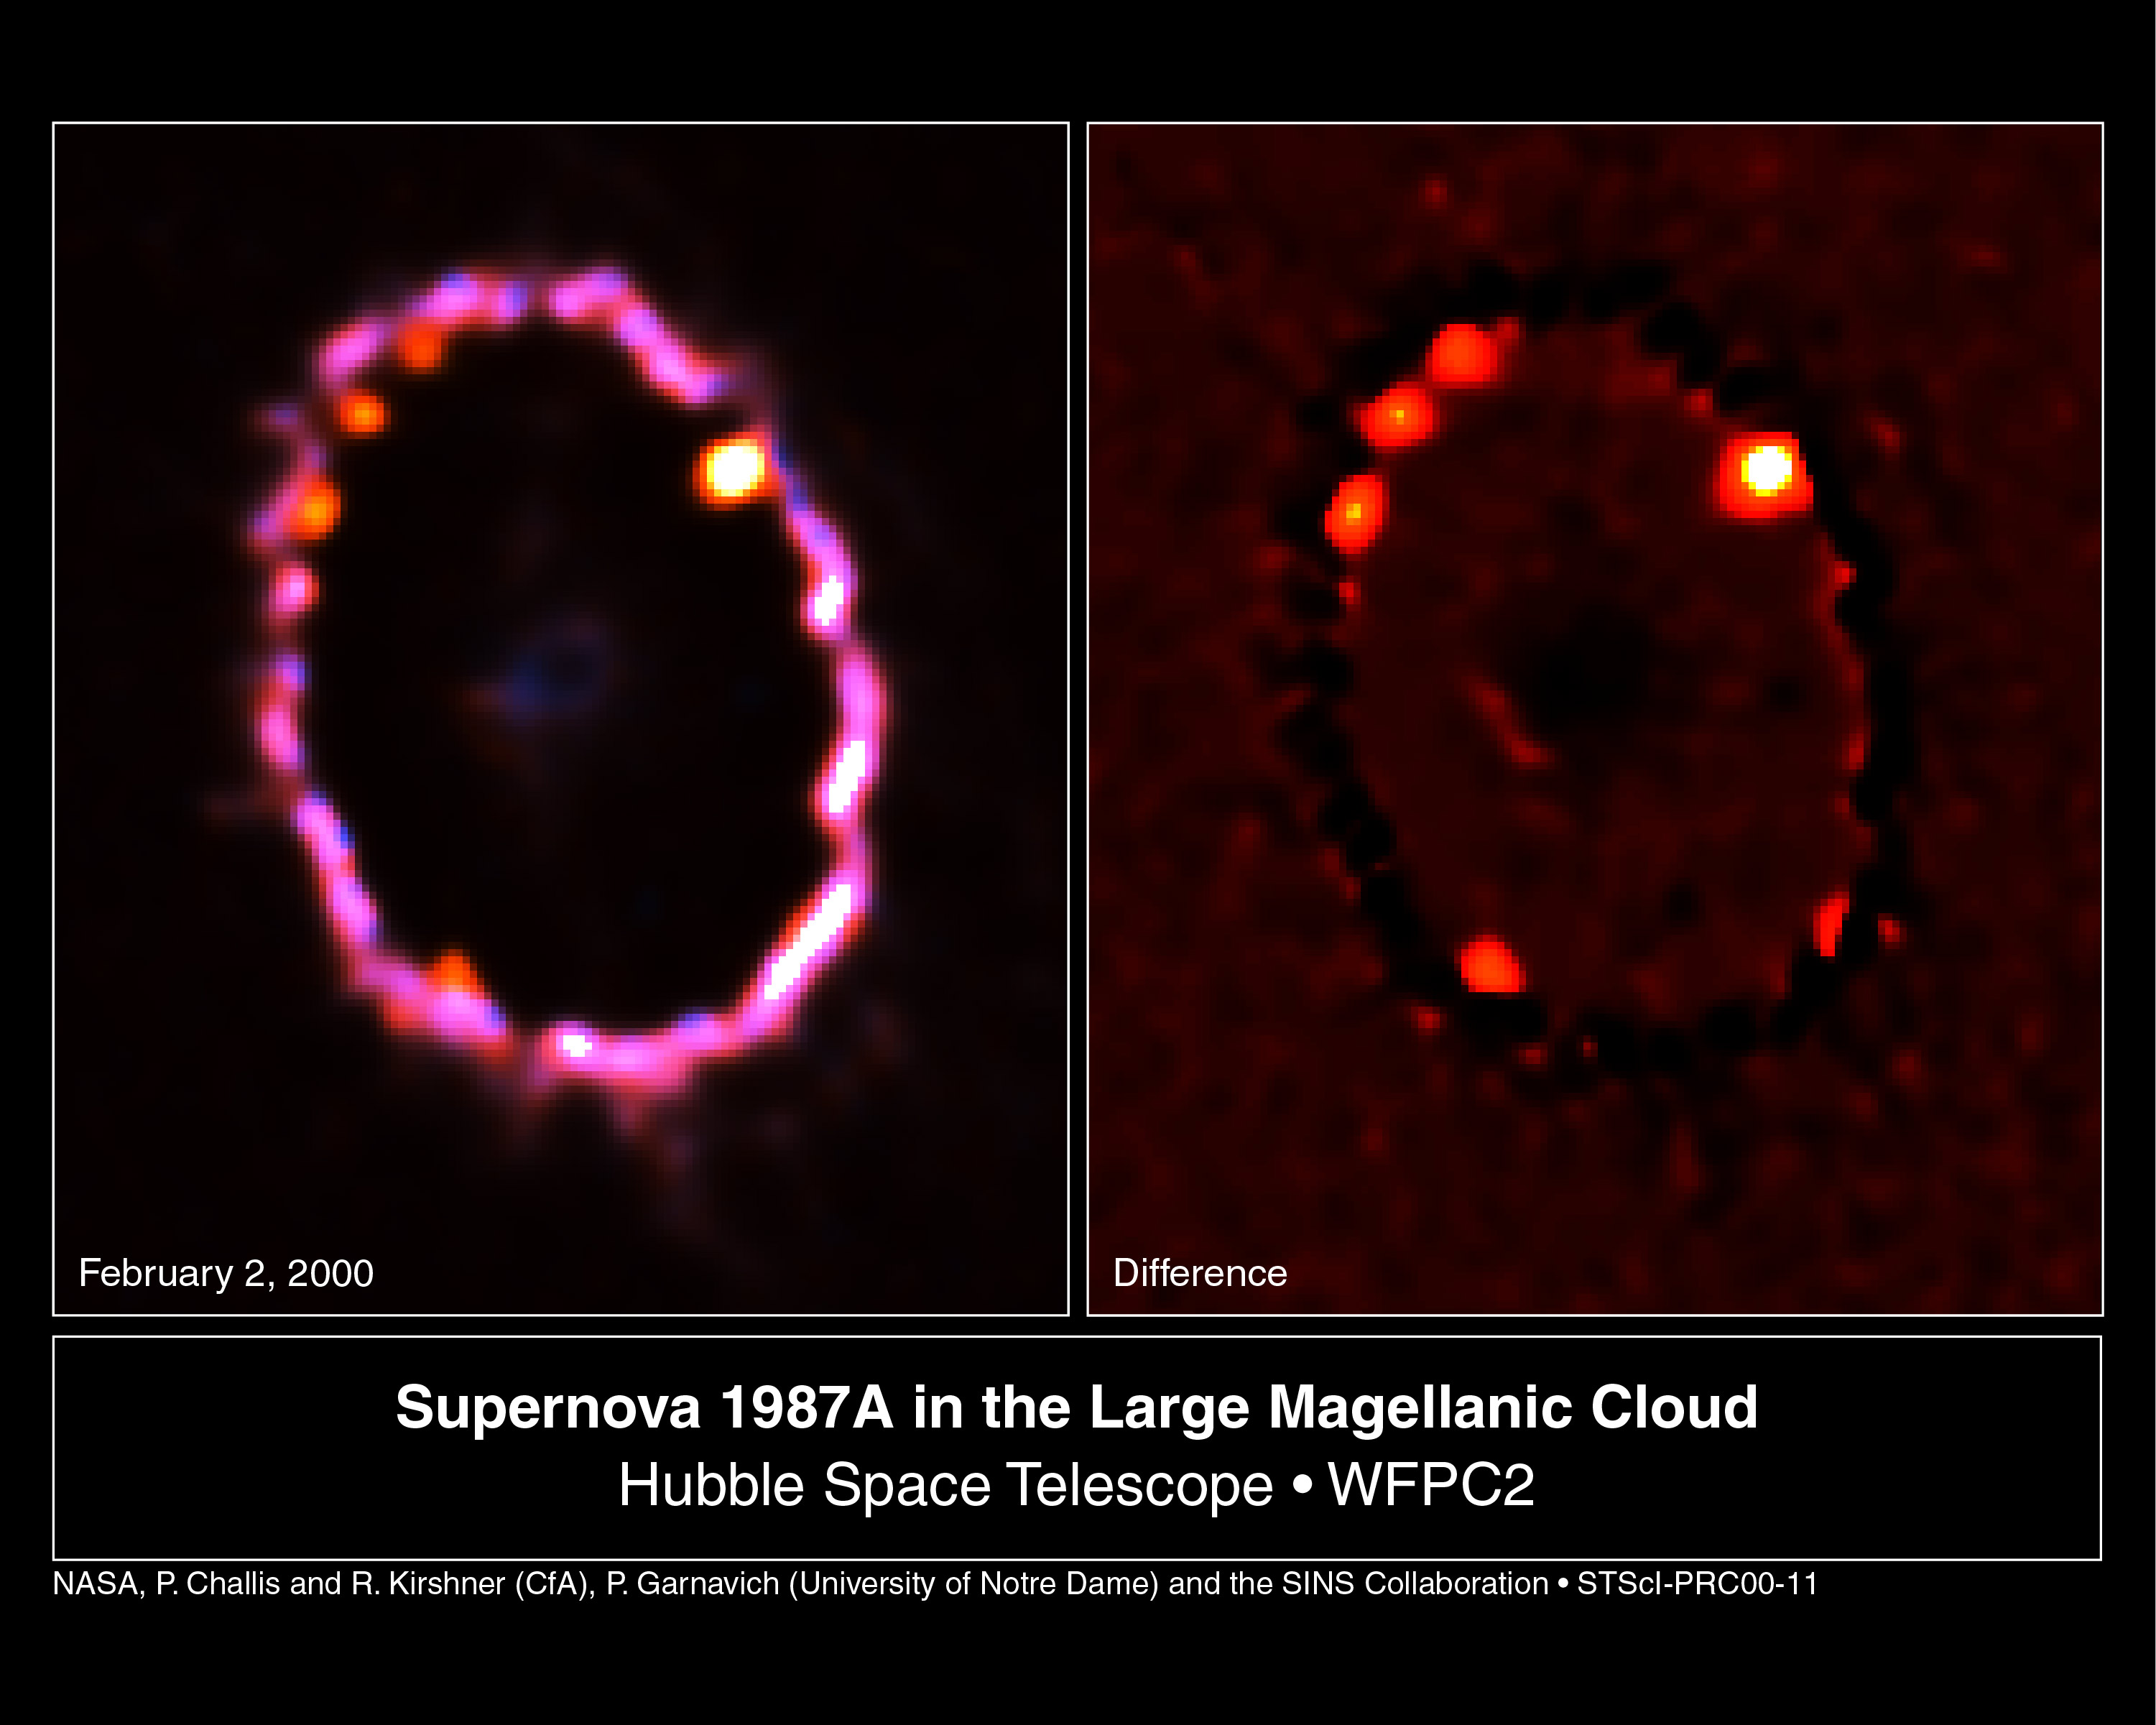

Supernova 1987A ring blazes back to life

[Left]

This NASA/ESA Hubble Space Telescope Wide Field and Planetary Camera 2 image shows the glowing gas ring around supernova 1987A, as seen on February 2, 2000. The gas, excited by light from the explosion, has been fading for a decade, but parts of it are now being heated by the collision of an invisible shockwave from the supernova explosion.

[Right]

Image processing is used to emphasize four new bright knots of superheated gas discovered in the February 2 Hubble observations. The brightest knot, at the far right, was seen in 1997. Astronomers have been waiting several years to see more of the ring light-up as the supernova shockwave smashes into it. This is the first definitive sign of the full onset of a dramatic and violent collision which will continue over the next few years, rejuvenating SN1987A as a powerful source of X-ray and radio emissions.

Both images were made in visual light. Computer image processing techniques were used to enhance details in the ring.

Credit: NASA/ESA, Peter Challis and Robert Kirshner (Harvard-Smithsonian Center for Astrophysics), Peter Garnavich (University of Notre Dame) and the SINS collaboration